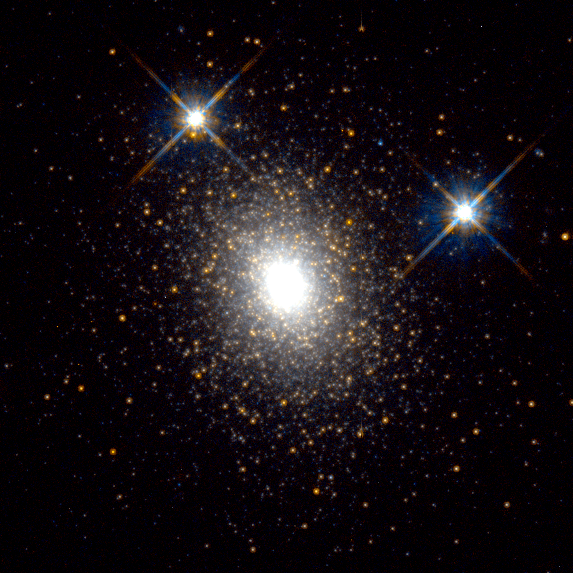

Globular Cluster in the Andromeda Galaxy

Hubble Space Telescope has captured a view of a globular cluster called G1, a large, bright ball of light in the centre of the photograph consisting of at least 300, 000 old stars.

Credit: Michael Rich, Kenneth Mighell, and James D. Neill (Columbia University), and Wendy Freedman (Carnegie Observatories), and NASA/ESA